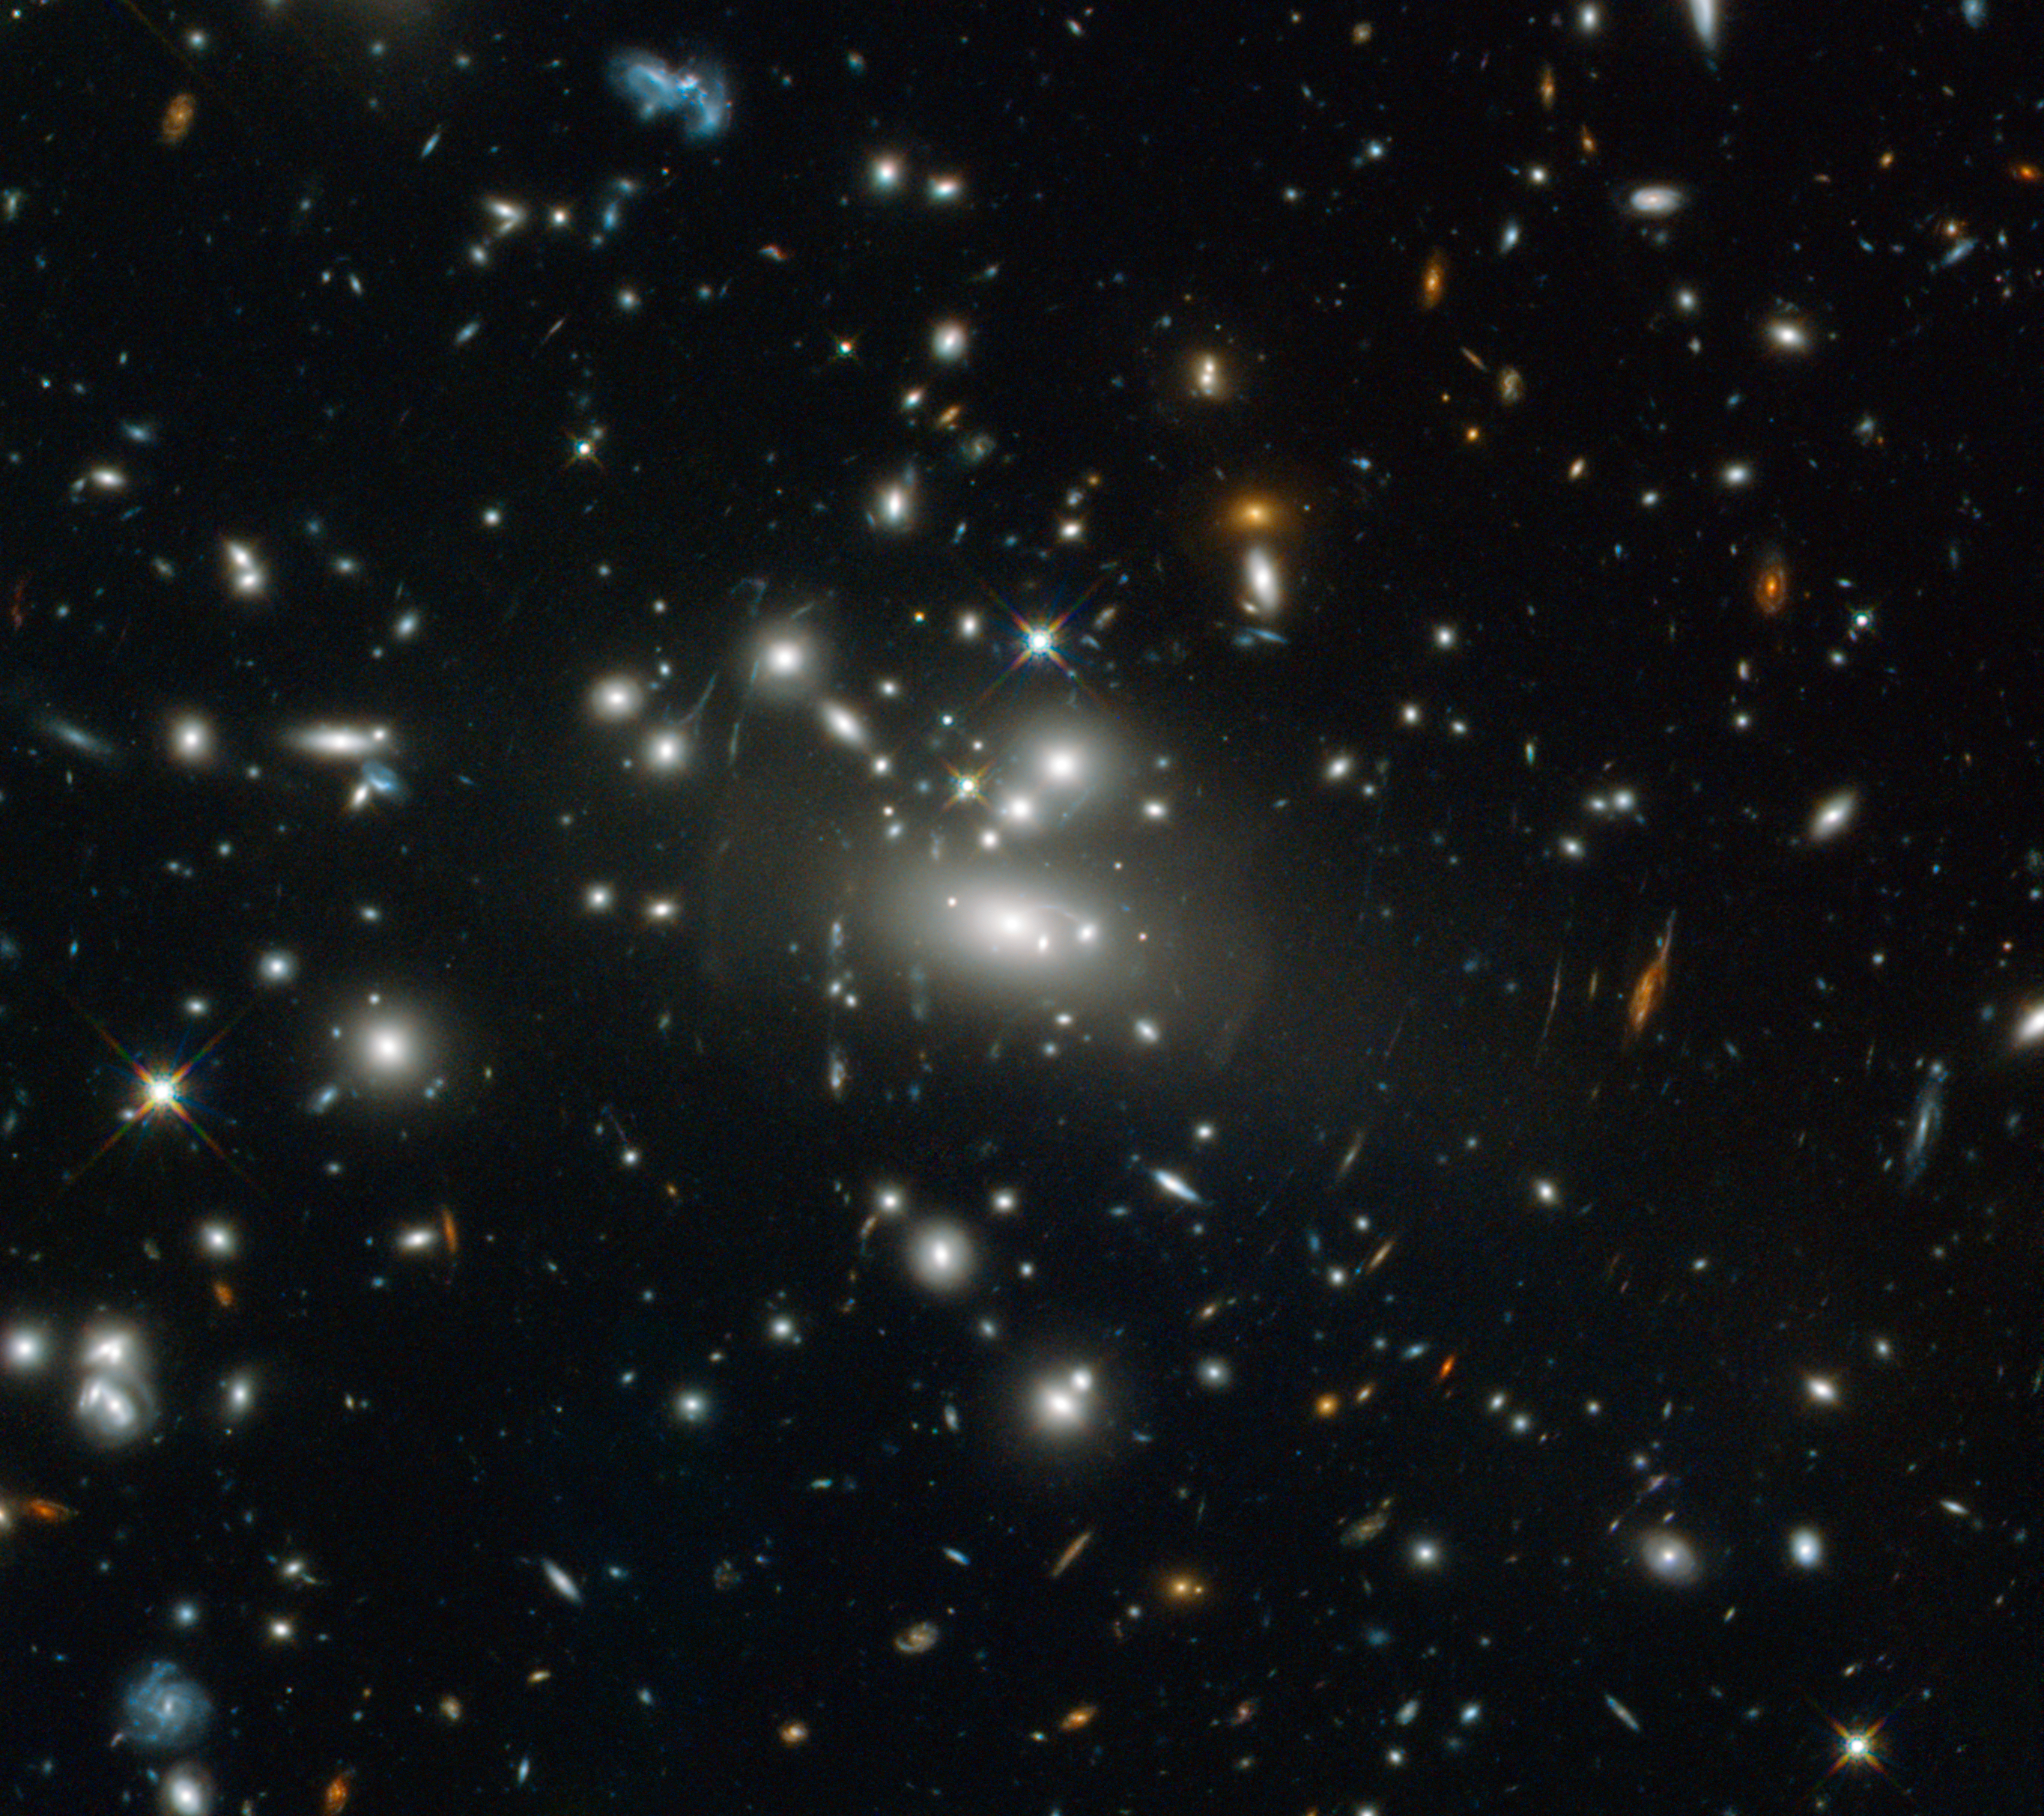

A spacetime magnifying glass

This Hubble image shows the galaxy cluster Abell S1077. Galaxy clusters are large groupings of galaxies, each of them including millions of stars. They are the largest existing structures in the Universe to be held together by their gravity.

The amount of matter condensed in such groupings is so high that their gravity is enough to warp the fabric of spacetime, distorting the path that light takes when it travels through the cluster. In some cases, this phenomenon produces an effect somewhat like a magnifying lens, allowing us to see objects that are aligned behind the cluster and which would otherwise be undetectable from Earth. In this image, you see stretched stripes that look like scratches on a lens but are, in fact, galaxies whose light is heavily distorted by the gravitational field of the cluster.

Astronomers use tools like the NASA/ESA Hubble Space Telescope and the effects of gravitational lensing to peer far back in time and space to see the furthest objects located in the early Universe. One of the record holders is MACS0647-JD, a galaxy seen by Hubble and the Spitzer Space Telescope with the help of a gravitational lens much like this one in the galaxy cluster MACS J0647.7+7015. Its light has taken 13.3 billion years to reach us.

This image is based in part on data spotted by Nick Rose in the Hubble’s Hidden Treasures image processing competition.

Credit: ESA/Hubble & NASA. Acknowledgement: N. Rose